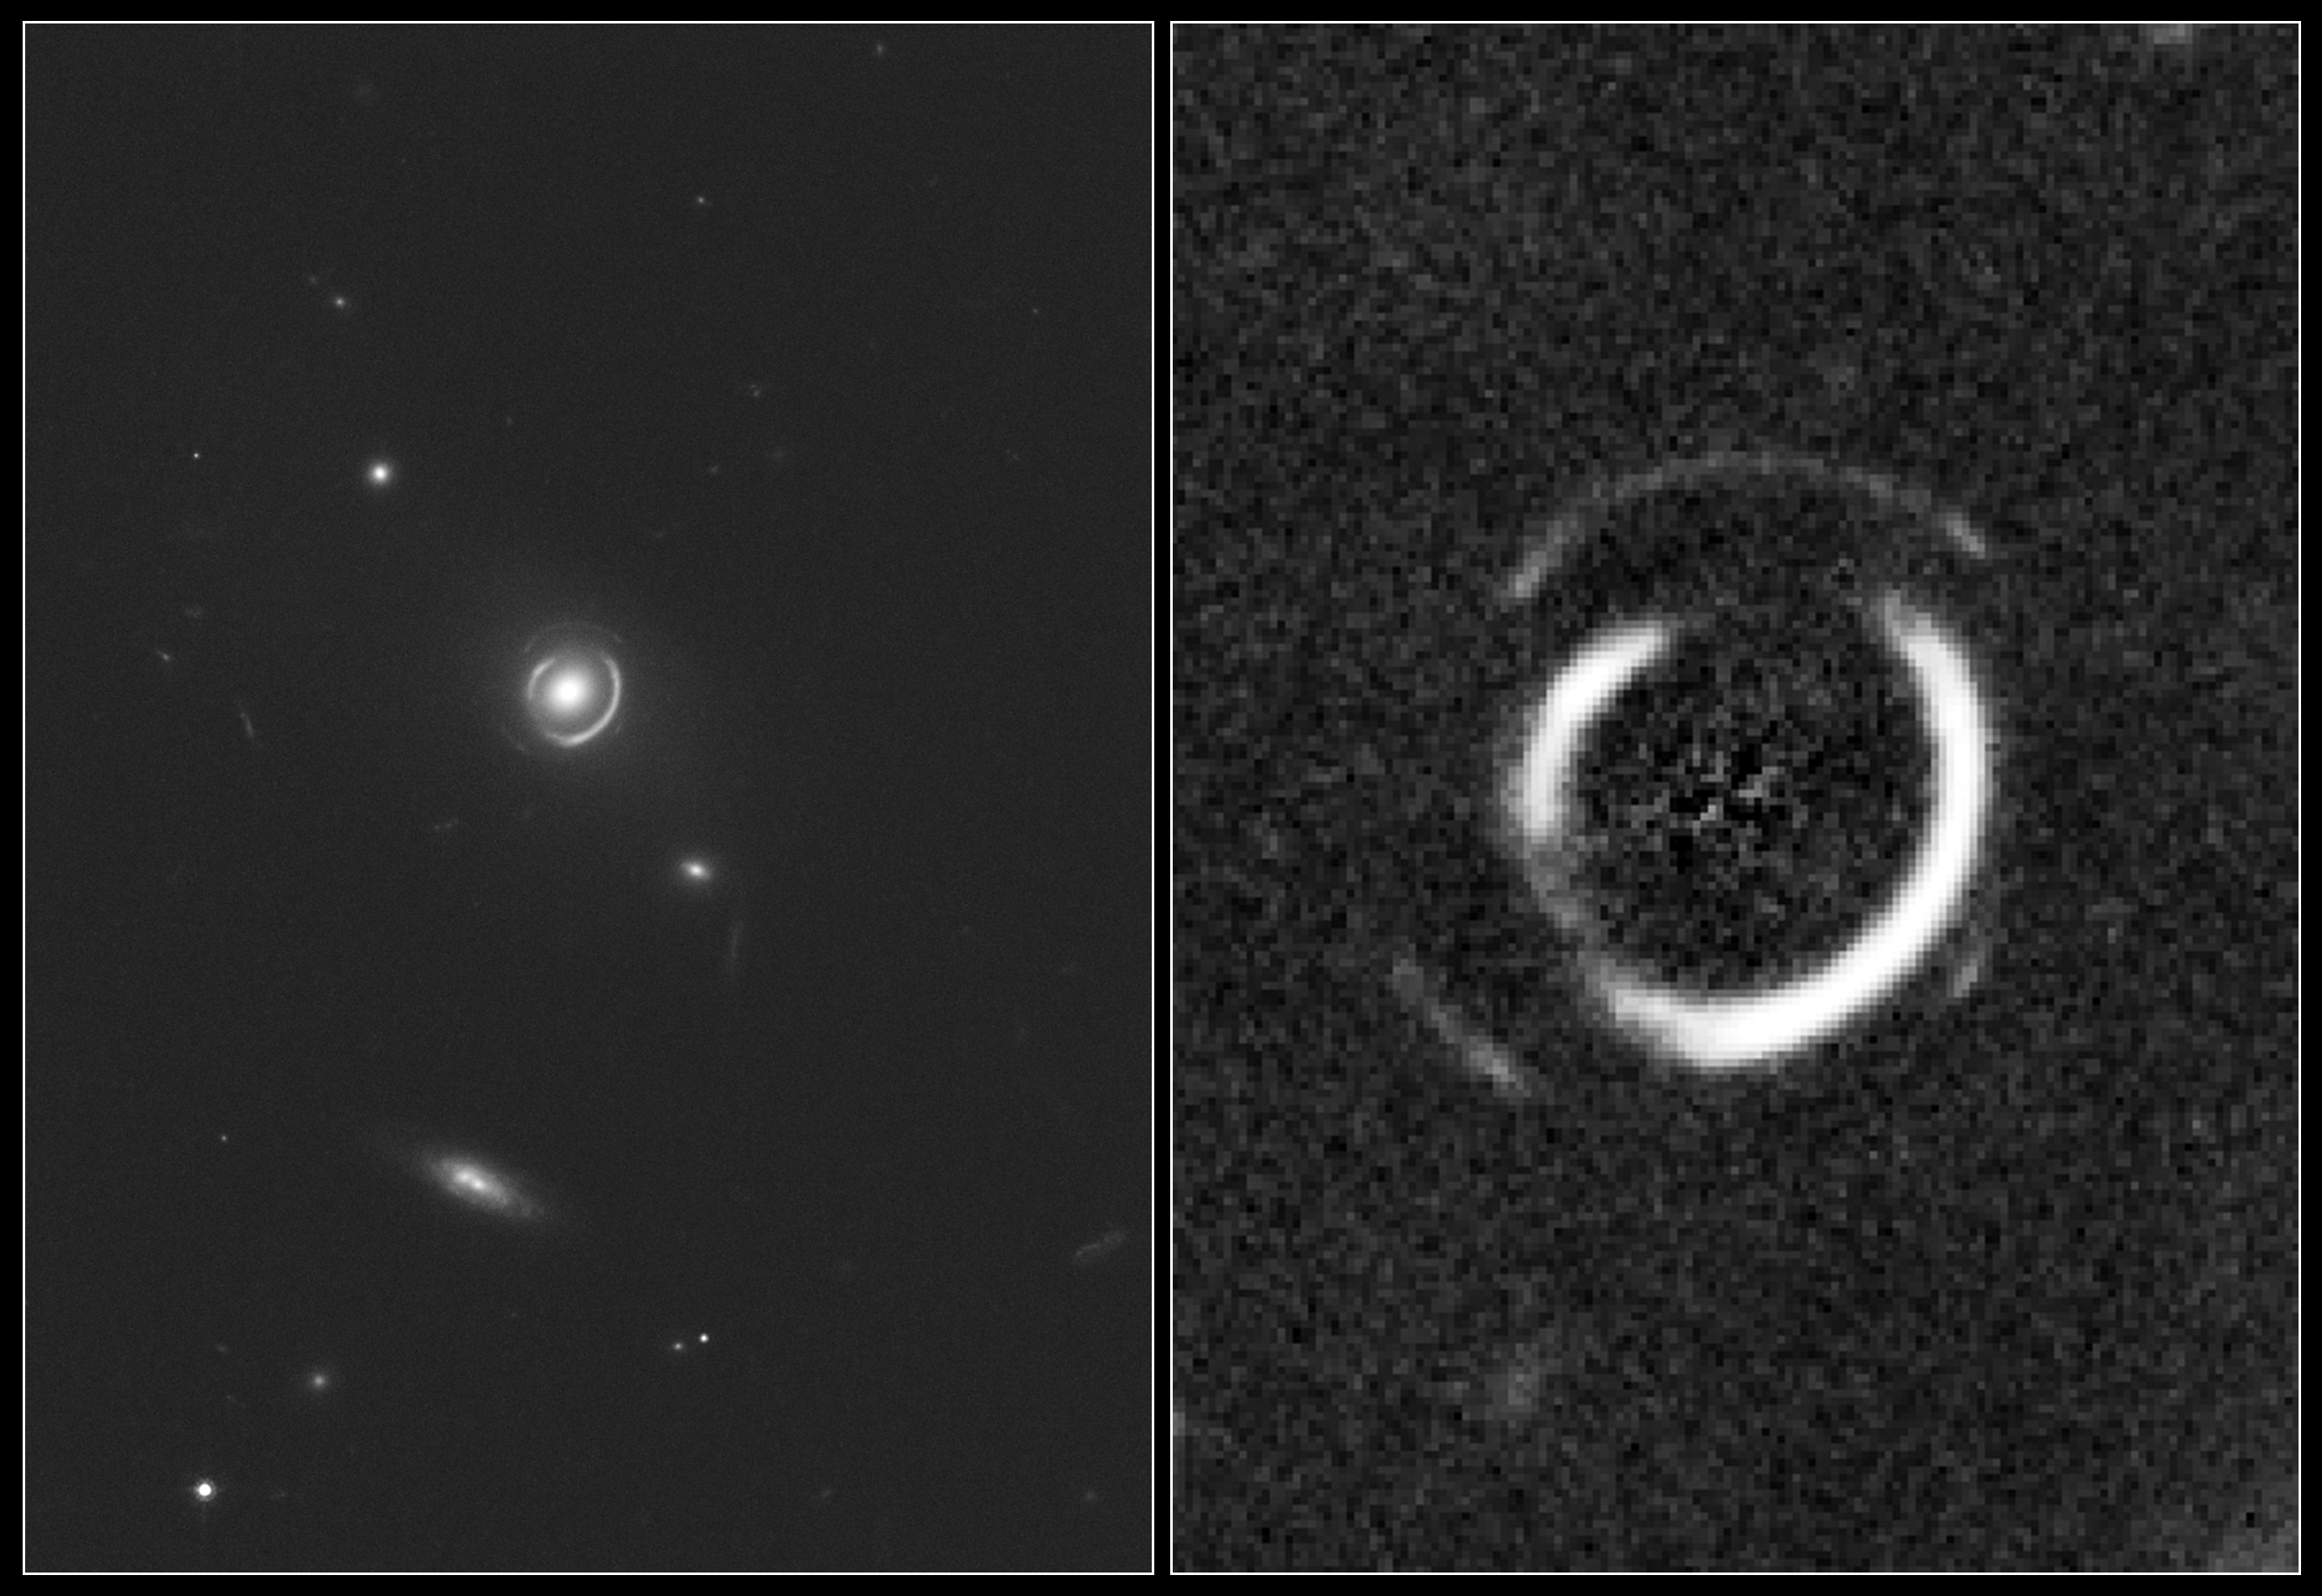

Hubble sees double Einstein ring

This is an image of gravitational lens system SDSSJ0946+1006 as photographed by Hubble Space Telescope's Advanced Camera for Surveys. The gravitational field of an elliptical galaxy warps the light of two galaxies exactly behind it. The massive foreground galaxy is almost perfectly aligned in the sky with two background galaxies at different distances. The foreground galaxy is 3 billion light-years away, the inner ring and outer ring are comprised of multiple images of two galaxies at a distance of 6 and approximately 11 billion light-years. The odds of seeing such a special alignment are estimated to be 1 in 10,000. The right panel is a zoom onto the lens showing two concentric partial ring-like structures after subtracting the glare of the central, foreground galaxy

Credit: NASA, ESA, and R. Gavazzi and T. Treu (University of California, Santa Barbara)